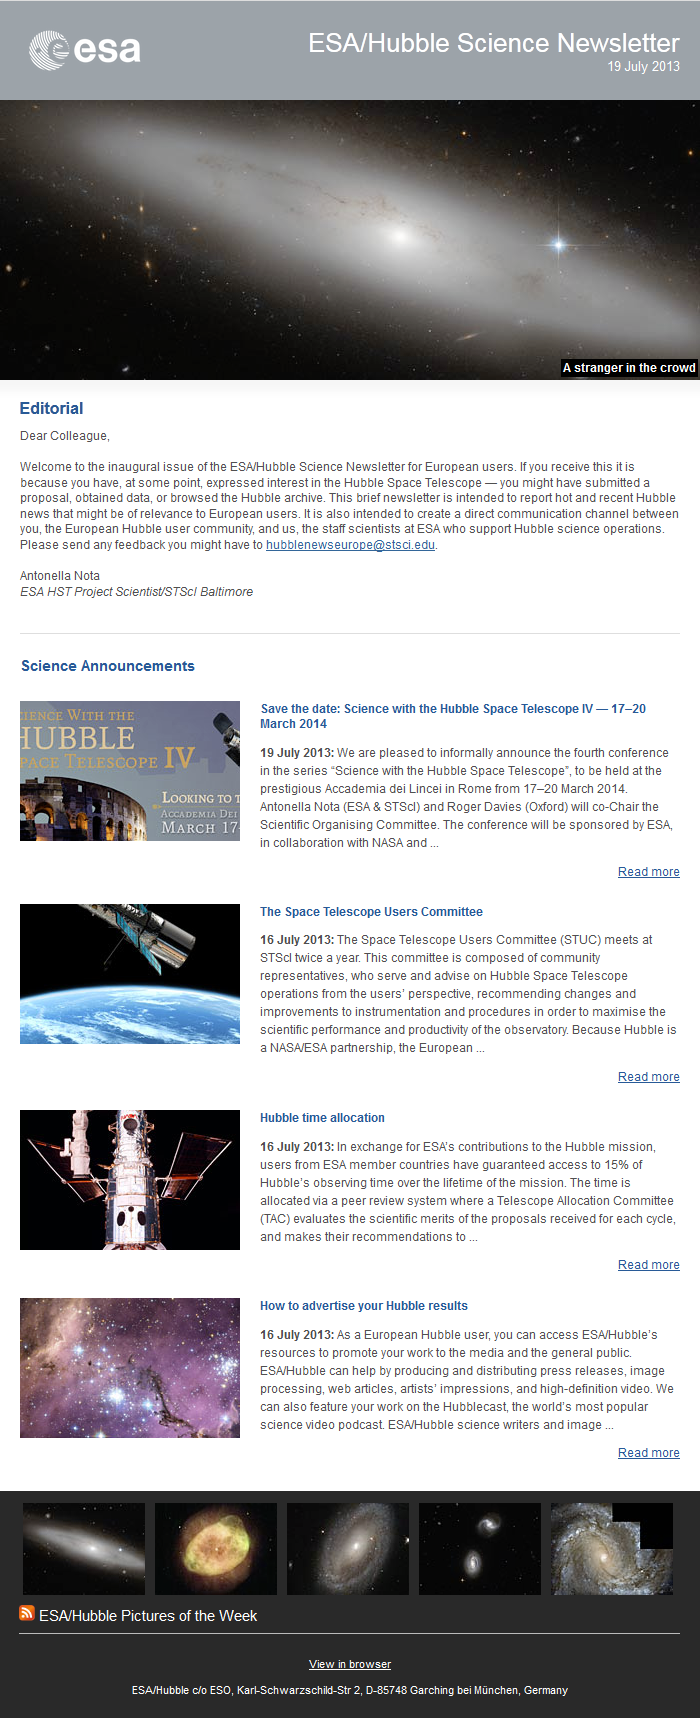

The July 2013 issue of the ESA/Hubble Science Newsletter

This screenshot shows the first edition of the new ESA/Hubble Science Newsletter, issued on 19 July 2013. This edition included announcements on Hubble time allocation, the upcoming “Science with Hubble IV” conference in Rome in March 2014, the Space Telescope Users Committee, and information on how to advertise science results with ESA/Hubble.

July 2013 edition of the ESA/Hubble Science Newsletter

Credit: ESA/Hubble